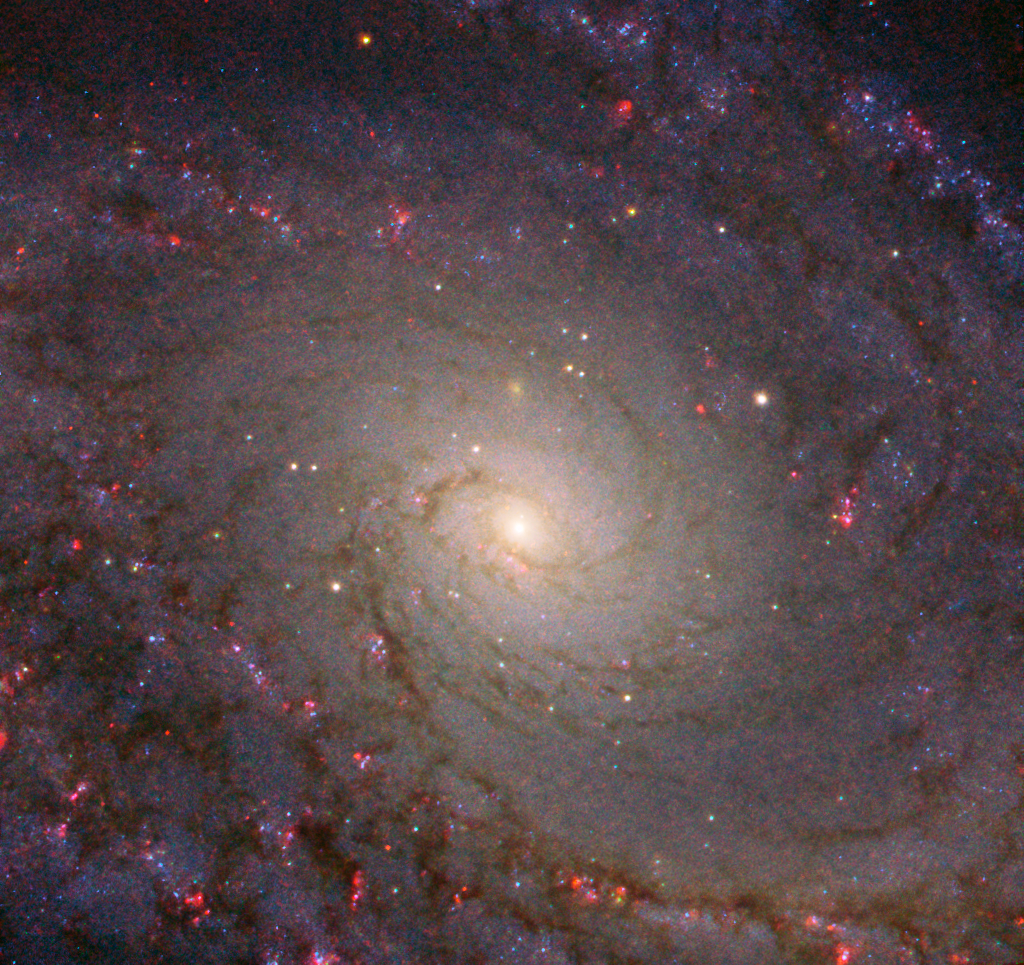

Nature’s Grand Design

This eye-catching galaxy is known as NGC 5364.

Unmistakably a spiral, NGC 5364 is also something known as a grand design spiral galaxy — a descriptive name deserved by only one-tenth of spirals. While all spirals have a structure that is broadly similar, there is quite a bit of variation amongst individual galaxies; some have patchy, oddly-shaped arms, some have bars of stars cutting through their core, some are colossal and radiant, and others are dim and diminutive. Grand designs like NGC 5364 are in many ways the archetype of a spiral galaxy. They are characterised by their prominent, well-defined arms, which circle outwards from a clear core.

Despite being classified in this way, NGC 5364 is far from perfect. Its arms are asymmetrical compared to other grand design spirals — this is thought to be due to interactions with a nearby neighbour. This neighbour and NGC 5364 are tugging on one another, warping and moving their stars and gas around and causing this misshapen appearance.

This image was captured by the NASA/ESA Hubble Space Telescope’s Advanced Camera for Surveys and Wide Field Camera 3.

Credit: ESA/Hubble & NASA, L. Ho, P. Erwin et al.